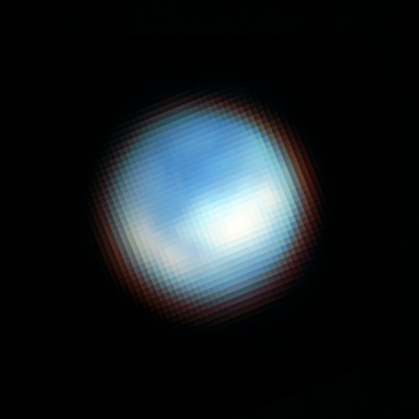

Europa (NIRCam image, cropped)

Webb’s NIRCam (Near Infrared Camera) captured this picture of the surface of Jupiter’s moon Europa. Webb identified carbon dioxide on the icy surface of Europa that likely originated in the moon’s subsurface ocean. This discovery has important implications for the potential habitability of Europa’s ocean. The moon appears mostly blue because it is brighter at shorter infrared wavelengths. The white features correspond with the chaos terrain Powys Regio (left) and Tara Regio (centre and right), which show enhanced carbon dioxide ice on the surface.

Credit: NASA, ESA, CSA, G. Villanueva (NASA/GSFC), S. Trumbo (Cornell Univ.), A. Pagan (STScI)